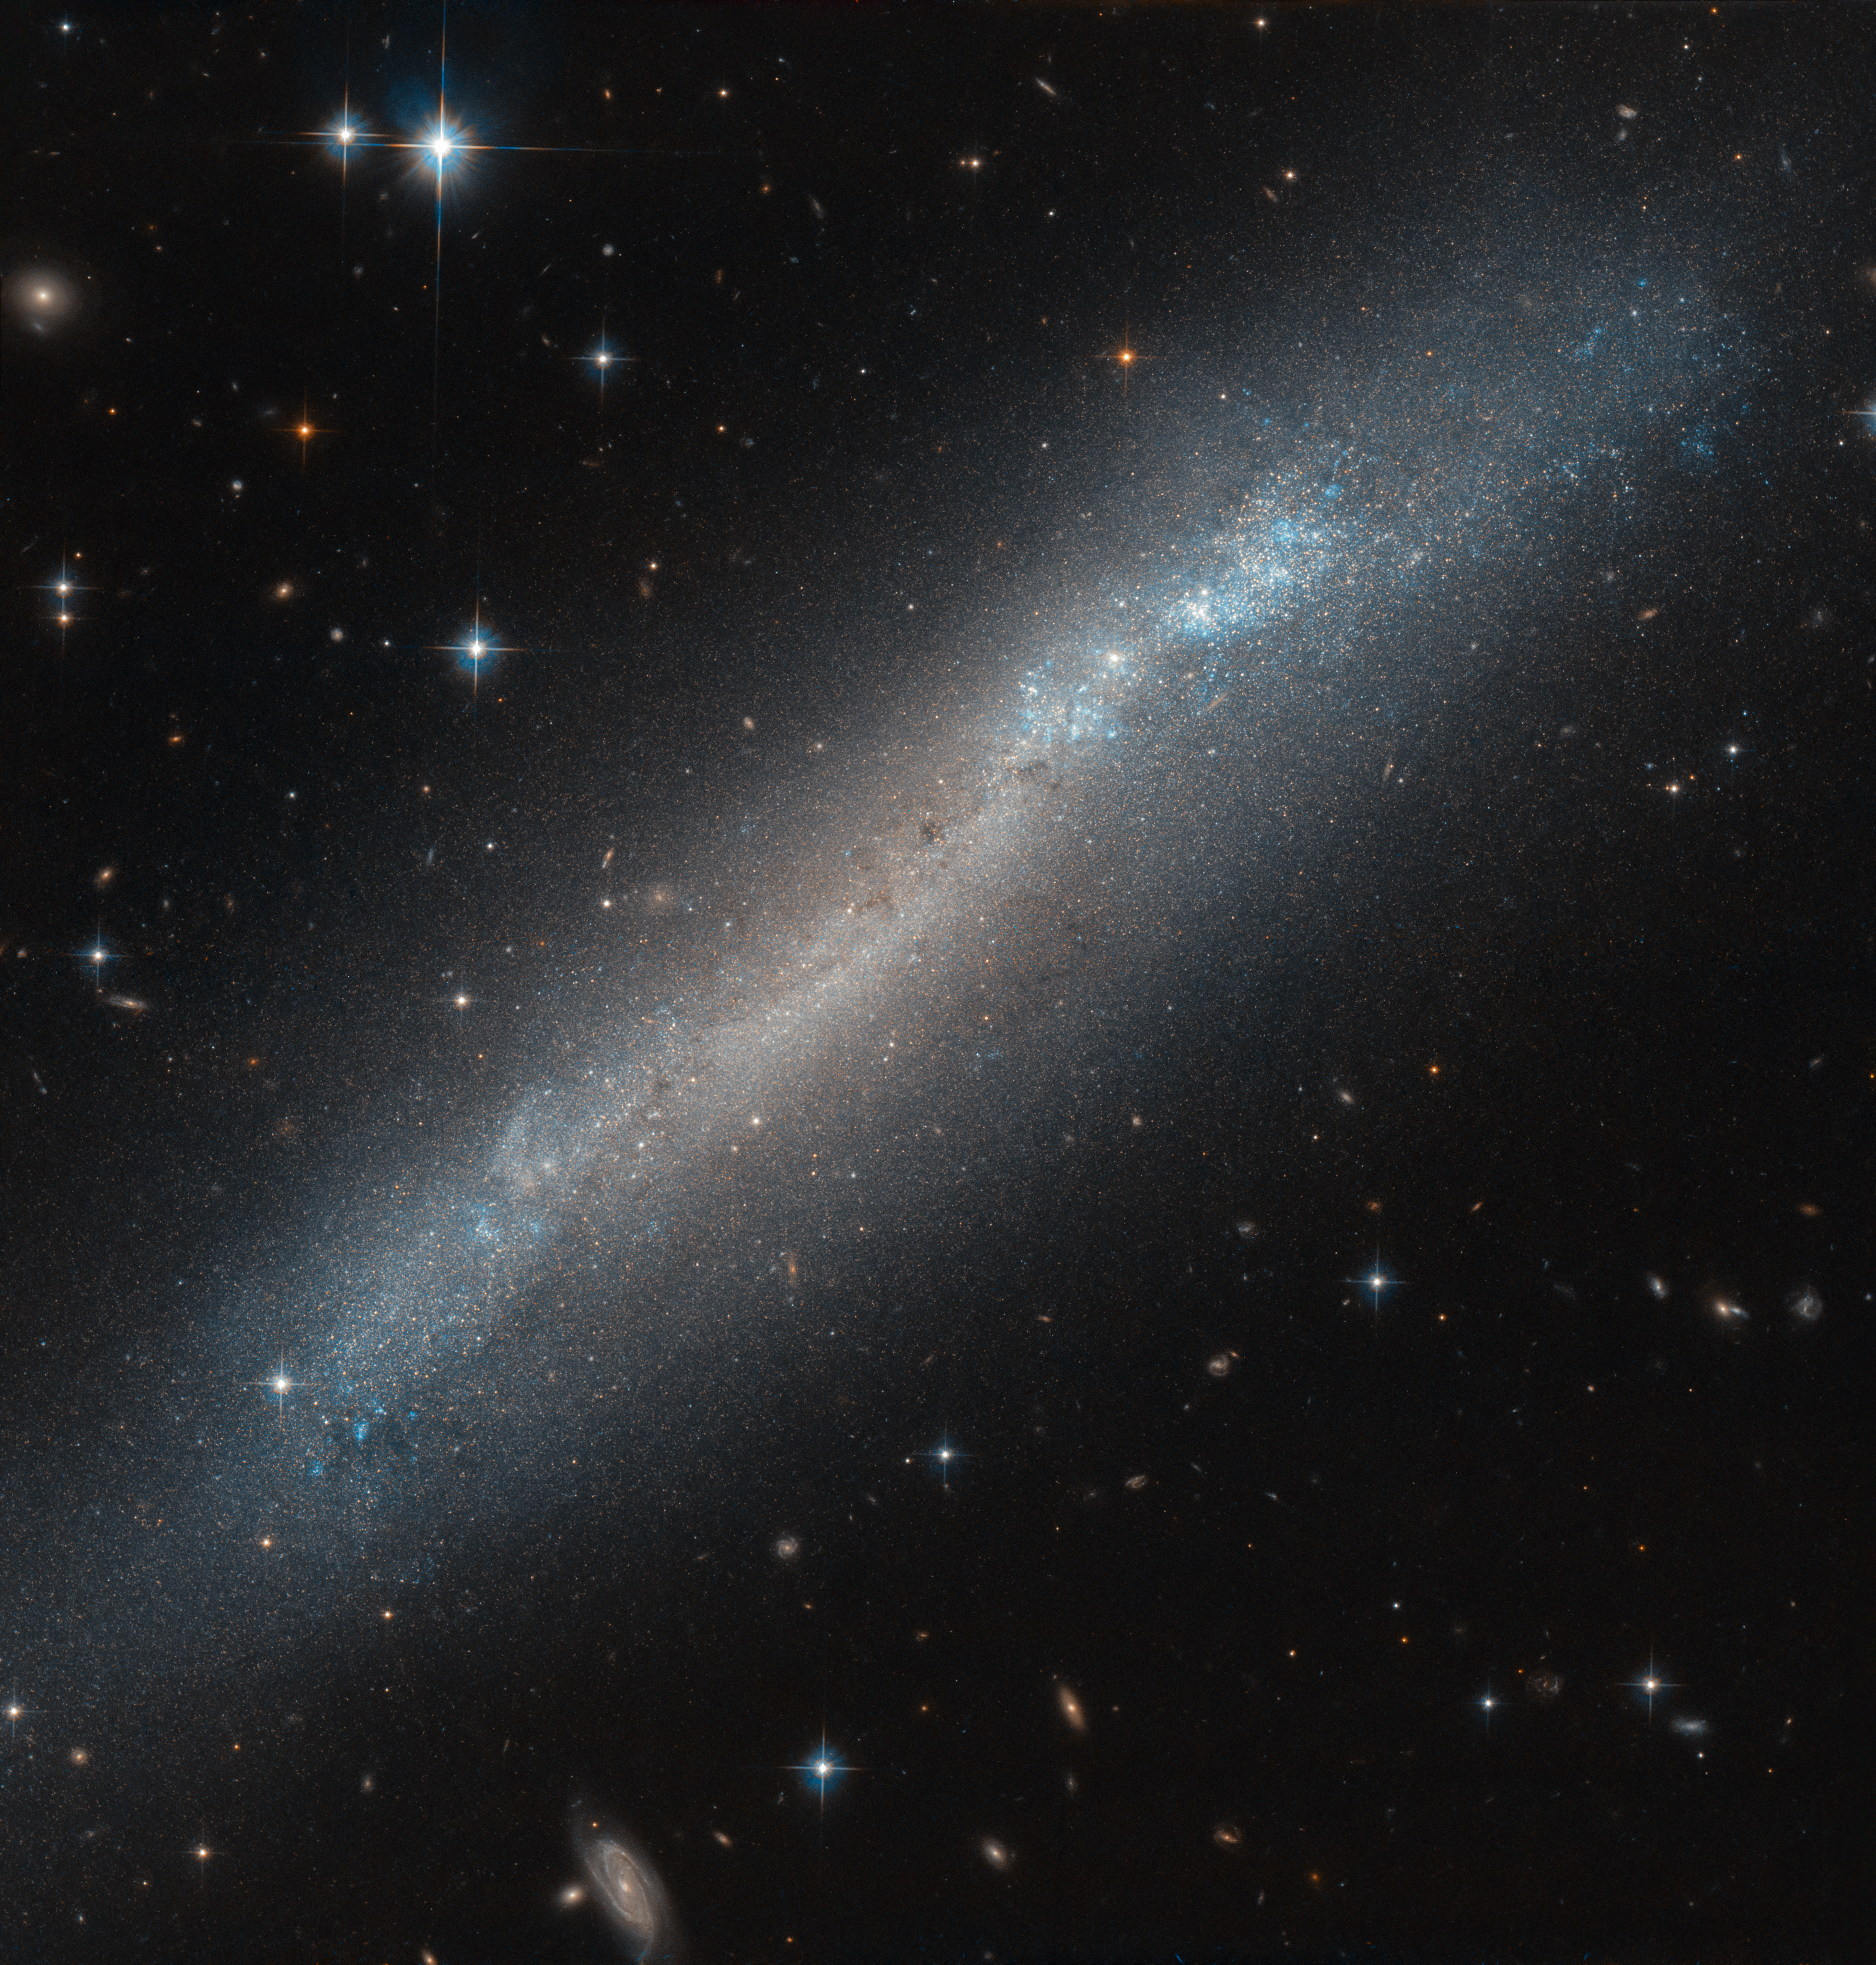

A Tilted Wonder

The blue and orange stars of the faint galaxy named NGC 2188 sparkle in this image taken with the NASA/ESA Hubble Space Telescope. Although NGC 2188 appears at first glance to consist solely of a narrow band of stars, it is classified by astronomers as a barred-spiral galaxy. It appears this way from our viewpoint on Earth as the centre and spiral arms of the galaxy are tilted away from us, with only the very narrow outer edge of the galaxy’s disc visible to us. Astronomers liken this occurrence to turning a dinner plate in your hands so you see only its outer edge. The true shape of the galaxy was identified by studying the distribution of the stars in the inner central bulge and outer disc and by observing the stars’ colours.

NGC 2188 is estimated to be just half the size of our Milky Way, at 50 000 light-years across, and it is situated in the constellation of Columba (The Dove). Named in the late 1500s after Noah’s dove in biblical stories, the small constellation consists of many faint yet beautiful stars and astronomical objects.

Credit: ESA/Hubble & NASA, R. Tully